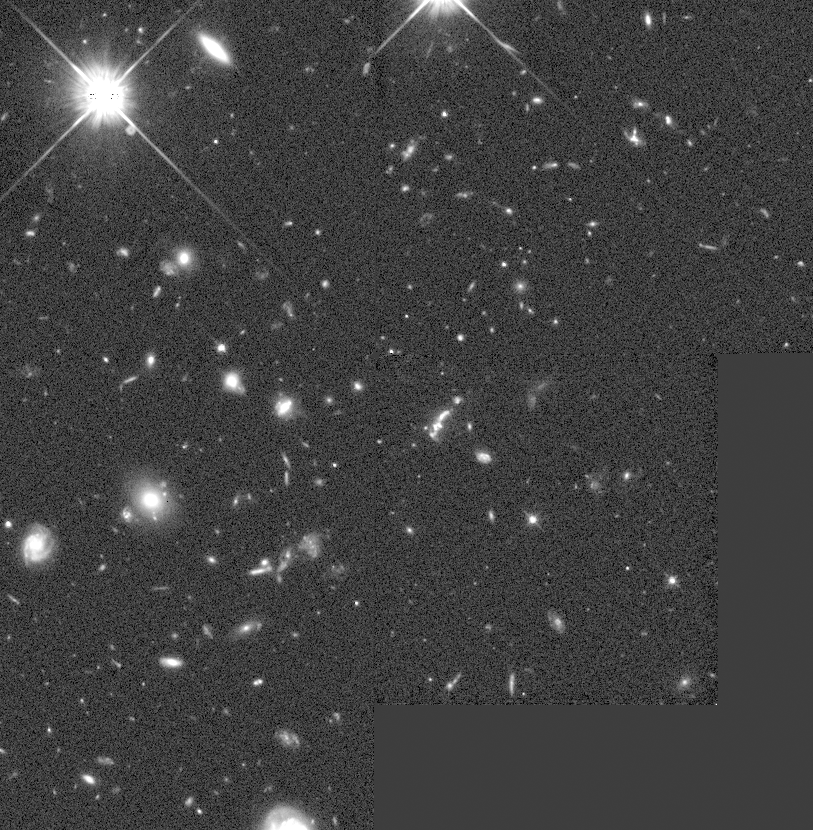

Galaxies: snapshots in time

NASA's Hubble Space Telescope is a time machine! Astronomers were able to obtain images of clear views of distant galaxies. A series of remarkable pictures, spanning the life history of the cosmos, provide the first clues to the life history of galaxies.

Credit: D. Macchetto, STScI, A. Dressler, Carnegie Institutions of Washington, M. Dickinson, STScI and NASA